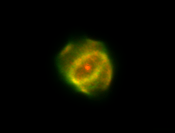

Planetary Nebula

This is a NASA/ESA Hubble Space Telescope picture of a recently-formed "planetary nebula", known as Hen 1357.

Credit: Matt Bobrowsky (CTA INCORPORATED), and NASA/ESA